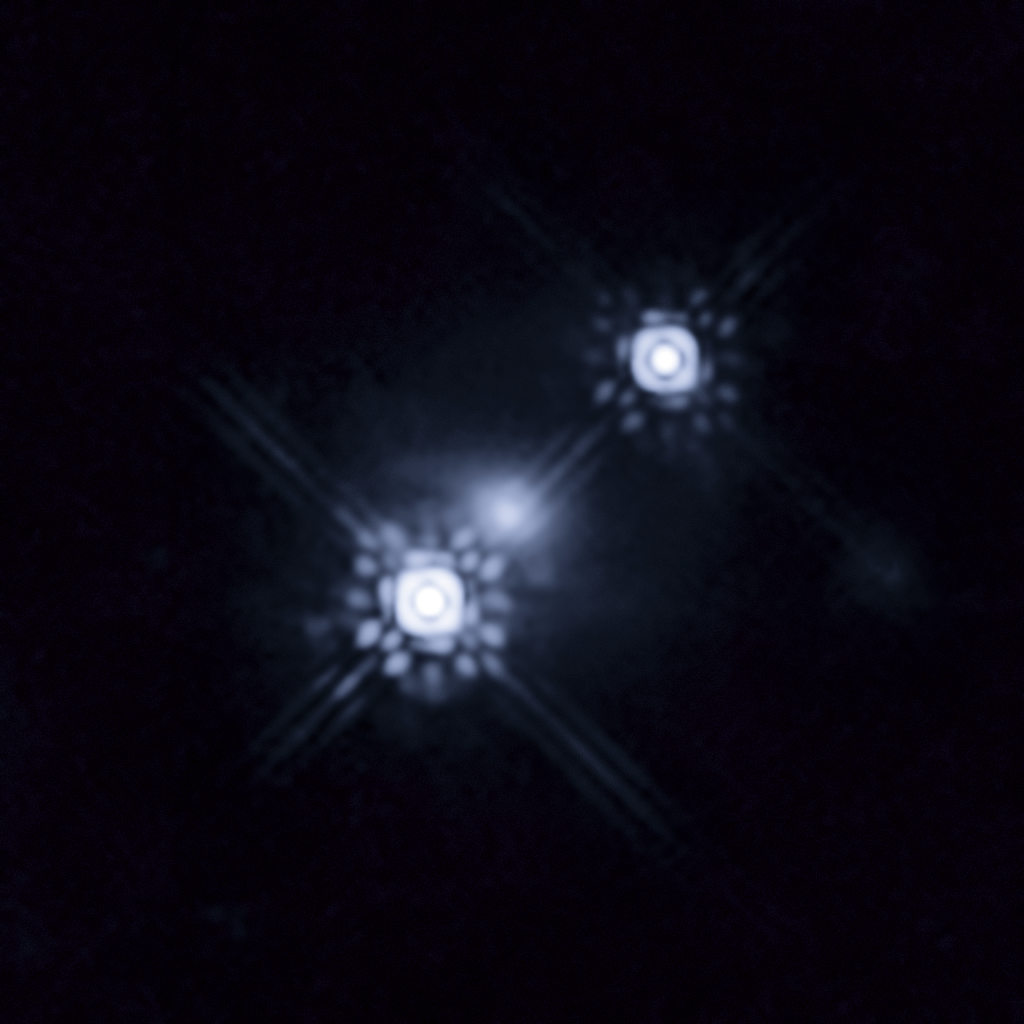

Gravitationally lensed quasar HE 1104-1805

This picture shows a quasar that has been gravitationally lensed by a galaxy in the foreground, which can be seen as a faint shape around the two bright images of the quasar.

Observations of one of the images show variations in colour over time. This is caused by stars within the lens galaxy passing through the path of the light from the quasar, magnifying the light from different parts of the quasar’s accretion disc as they move. This has allowed a team of scientists to reconstruct the colour and temperature profile of the accretion disc with unprecedented precision. The level of detail involved is equivalent to being able to study individual grains of sand on the surface of the Moon while standing on Earth.

Credit: NASA, ESA and J.A. Muñoz (University of Valencia)